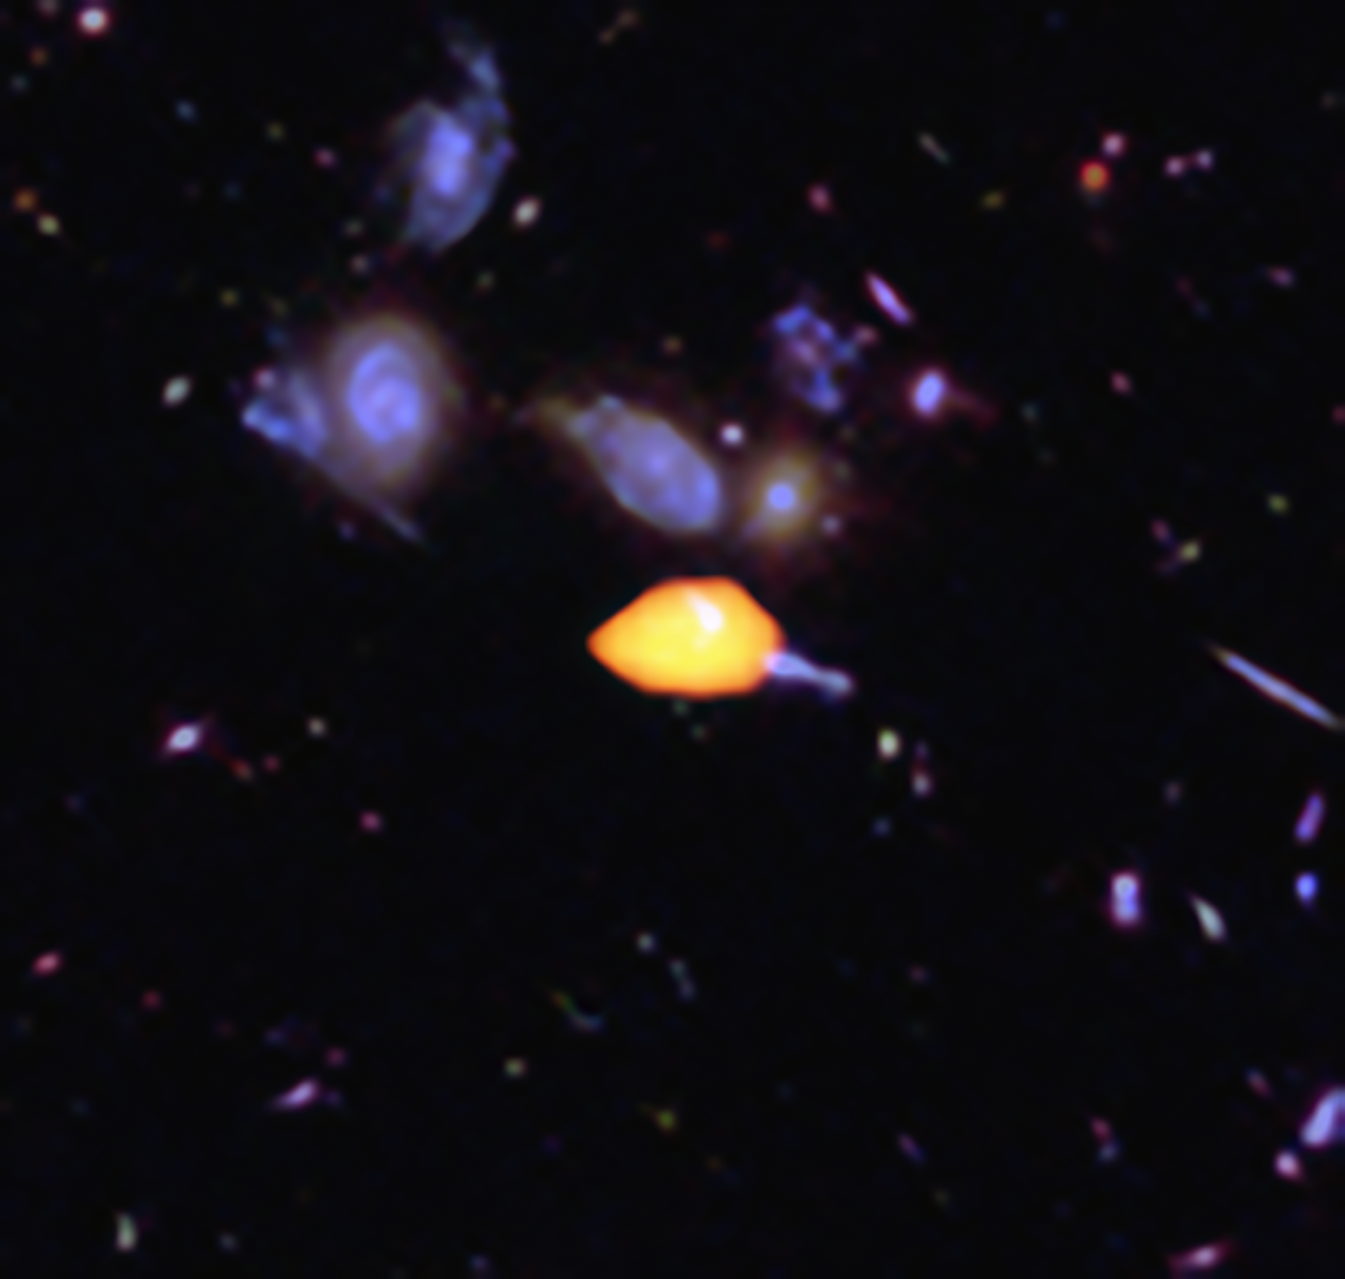

ALMA deep view of part of the Hubble Ultra Deep Field

The Atacama Large Millimeter/submillimeter Array (ALMA) surveyed the Hubble Ultra Deep Field, uncovering new details of the star-forming history of the Universe. This close-up image reveals one such galaxy (orange), rich in carbon monoxide, showing it is primed for star formation. The blue features are galaxies imaged by Hubble.

This image is based on the very deep ALMA survey by Manuel Aravena, Fabian Walter and colleagues, covering about one sixth of the full Hubble Ultra Deep Field area.

Credit: B. Saxton (NRAO/AUI/NSF); ALMA (ESO/NAOJ/NRAO); NASA/ESA Hubble